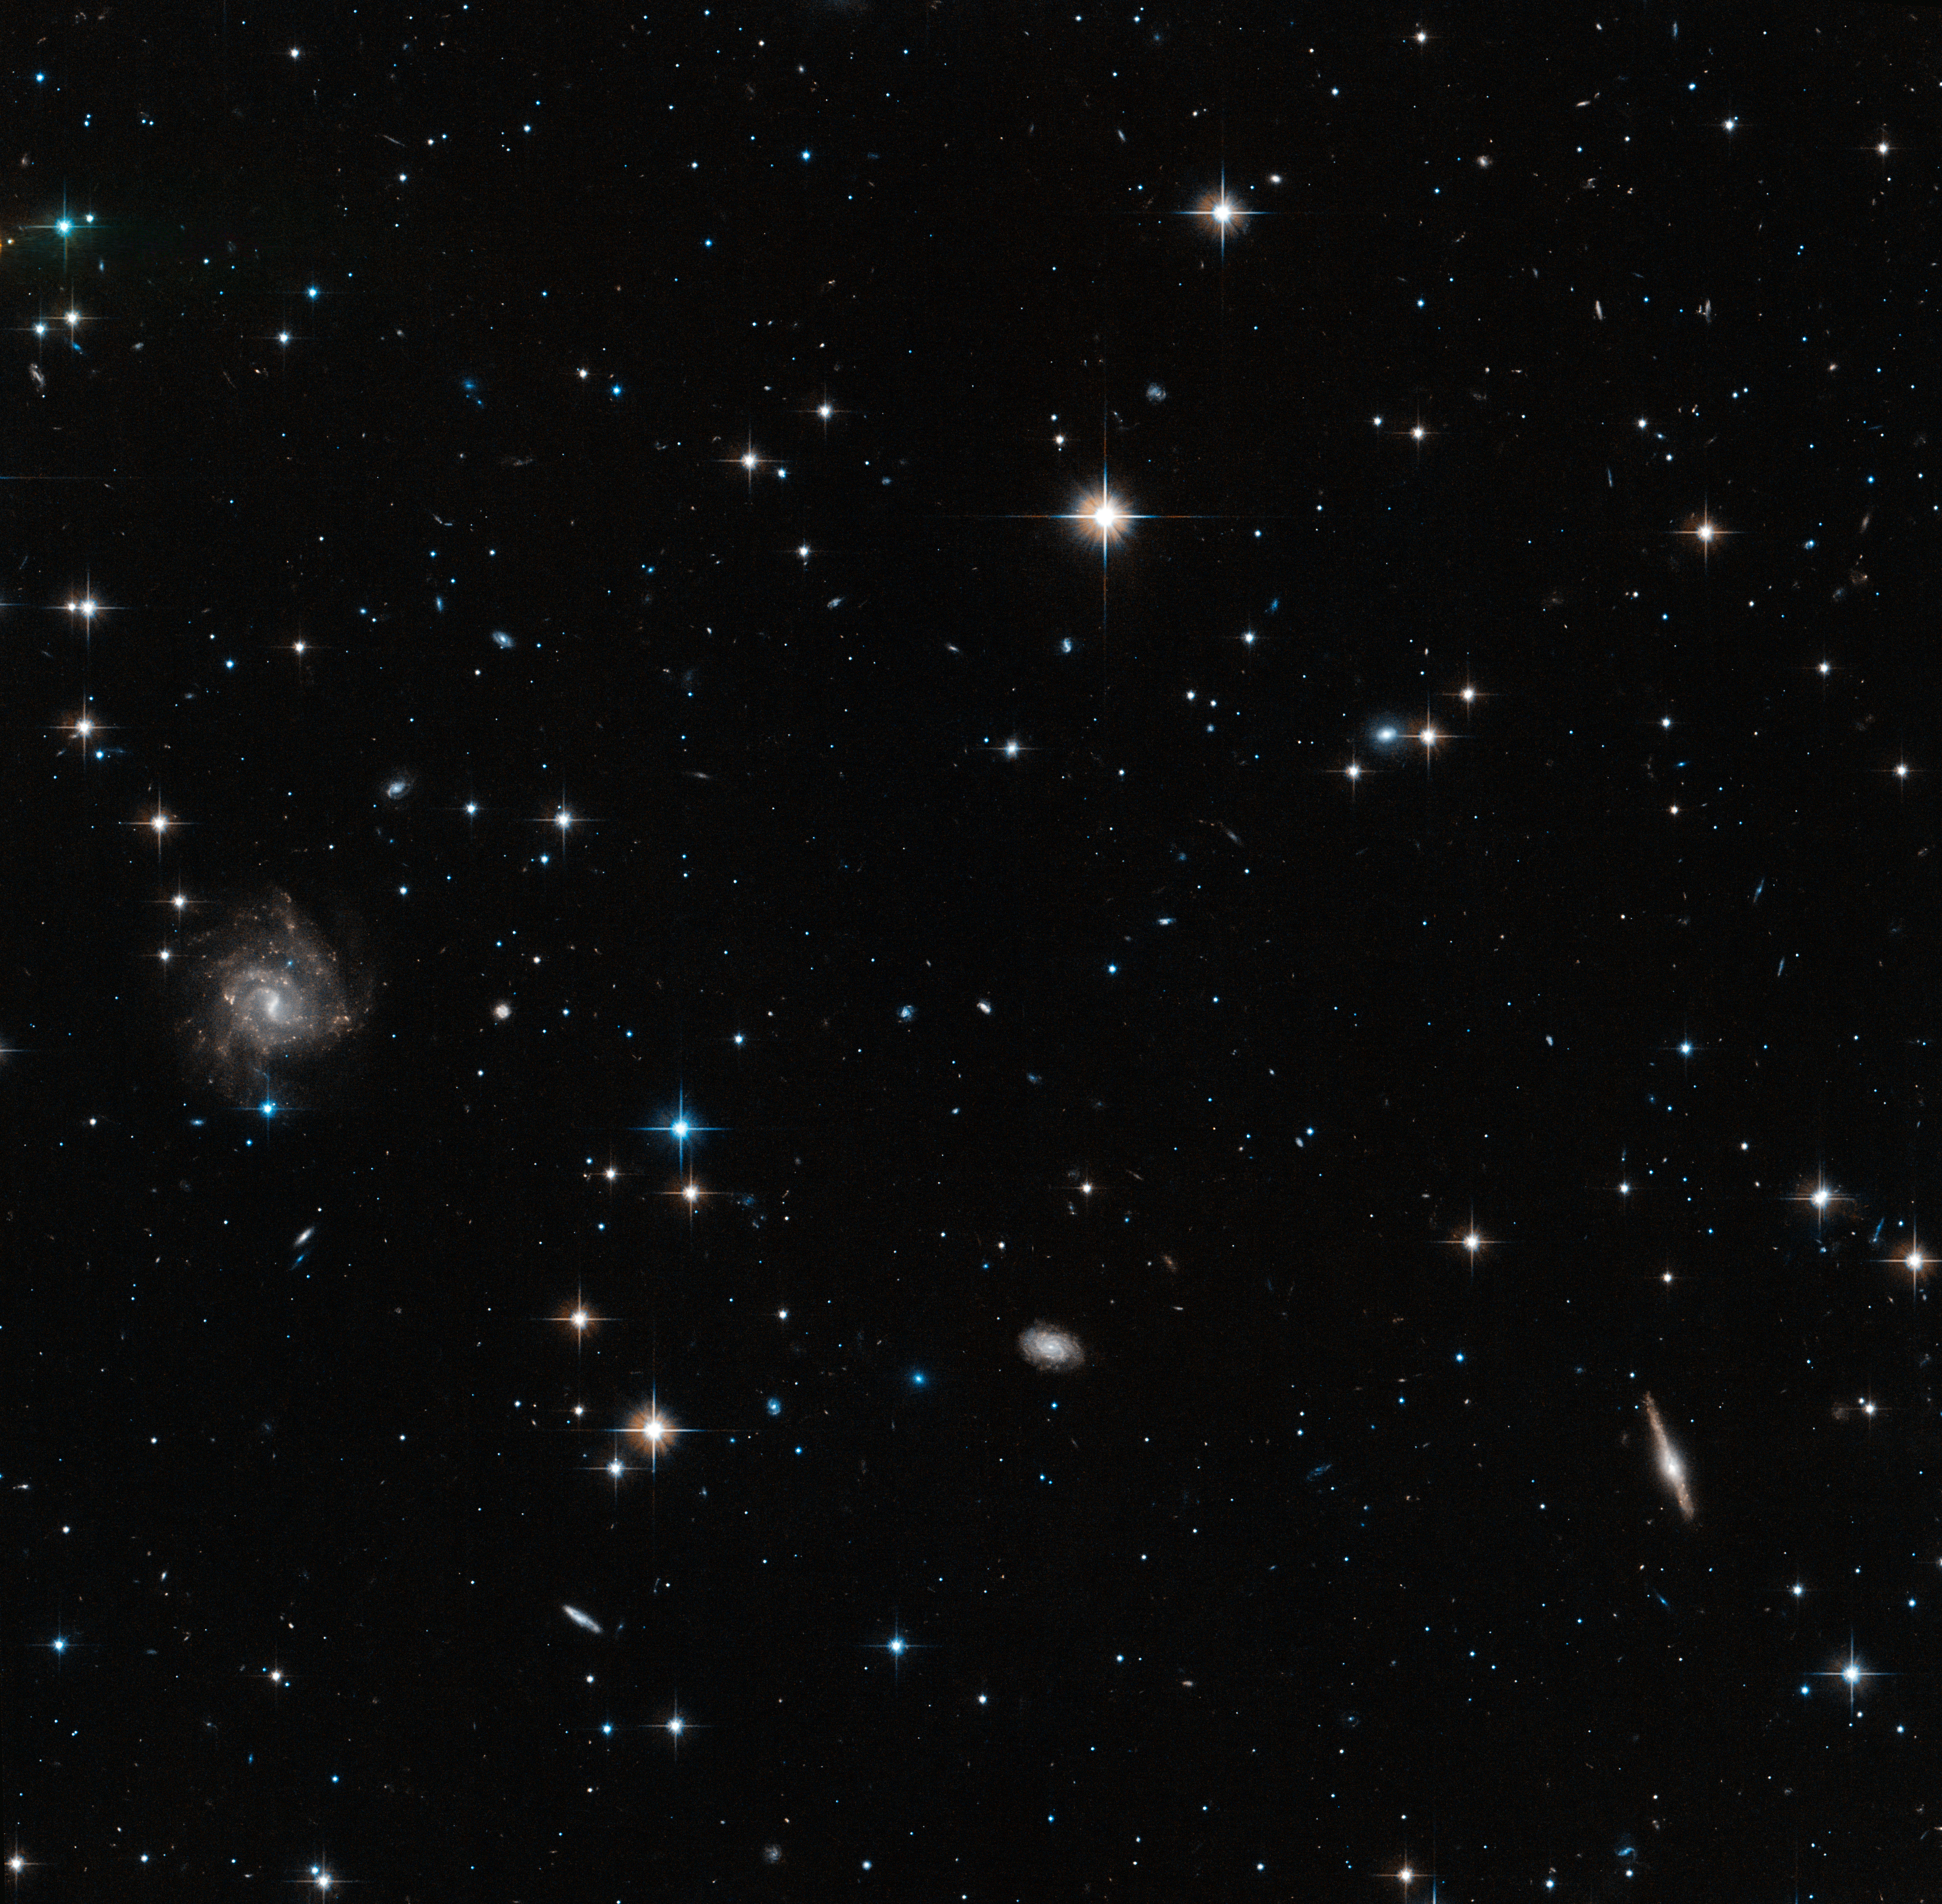

Area of Centaurus A halo probed by Hubble

This image shows one of the areas of Centaurus A's halo probed by the NASA/ESA Hubble Space Telescope's Advanced Camera for Surveys.

Hubble's unique capabilities allowed astronomers to analyse the faint stars in the halo, which can be seen in this image along with the brighter foreground stars in the Milky Way, and the much more distant background galaxies.

The larger context for this image can be found in the widefield annotated image of Centaurus A.

Credit: ESA/Hubble, NASA Acknowledgement: Marina Rejkuba (European Southern Observatory)